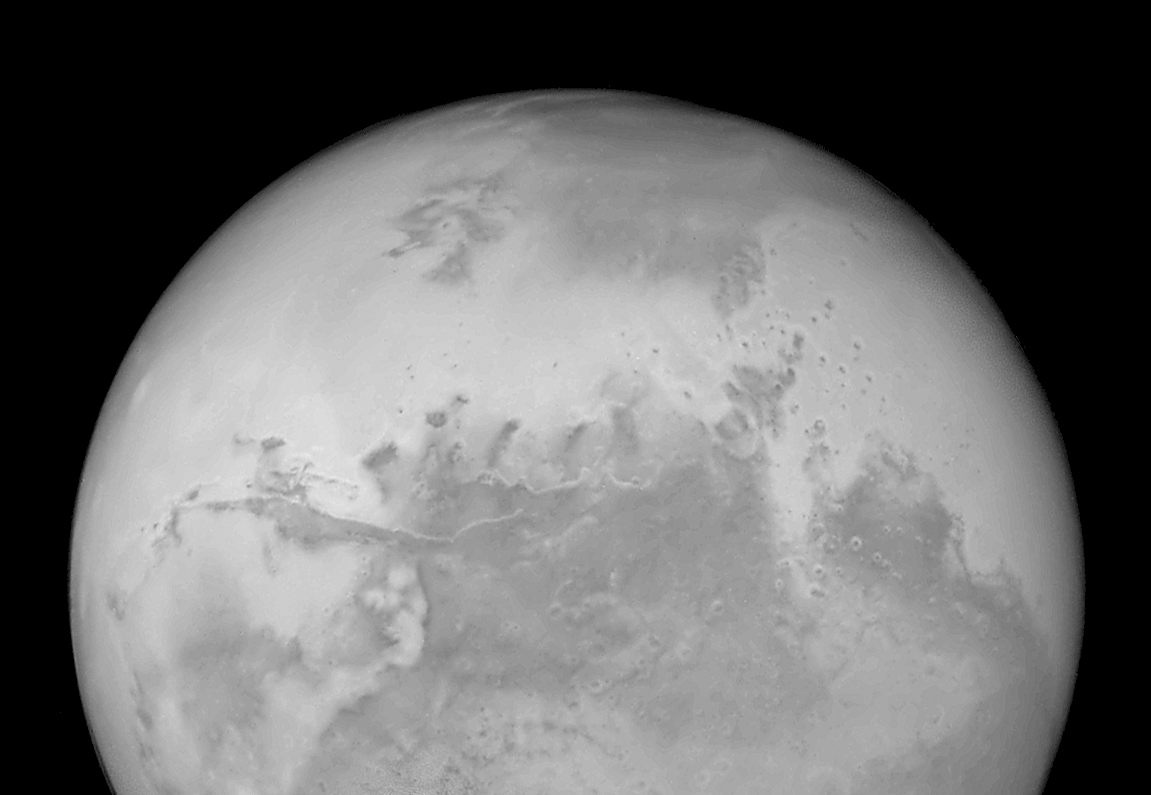

Hubble's Sharpest View of Mars: ACS Image

This view of Mars from the Hubble Space Telescope's new Advanced Camera for Surveys provides the sharpest view of the red planet attainable by the Earth-oribiting observatory. The picture was taken August 24, when Mars was approximately 34.7 million miles (or 55.8 million kilometres) from Earth.

The central linear feature running from left to right is Valles Marineris, a 2,480-mile (4,000-km) system of canyons. Sunlight illuminates one wall of the canyon, creating a striking white linear feature. To the bottom left lies Solis Lacus (Lake of the Sun) At far left is the great Tharsis plateau. A chain of three dormant volcanoes can barely be seen along the left limb.

Credit: NASA/ESA, J. Bell (Cornell U.) and M. Wolff (SSI)